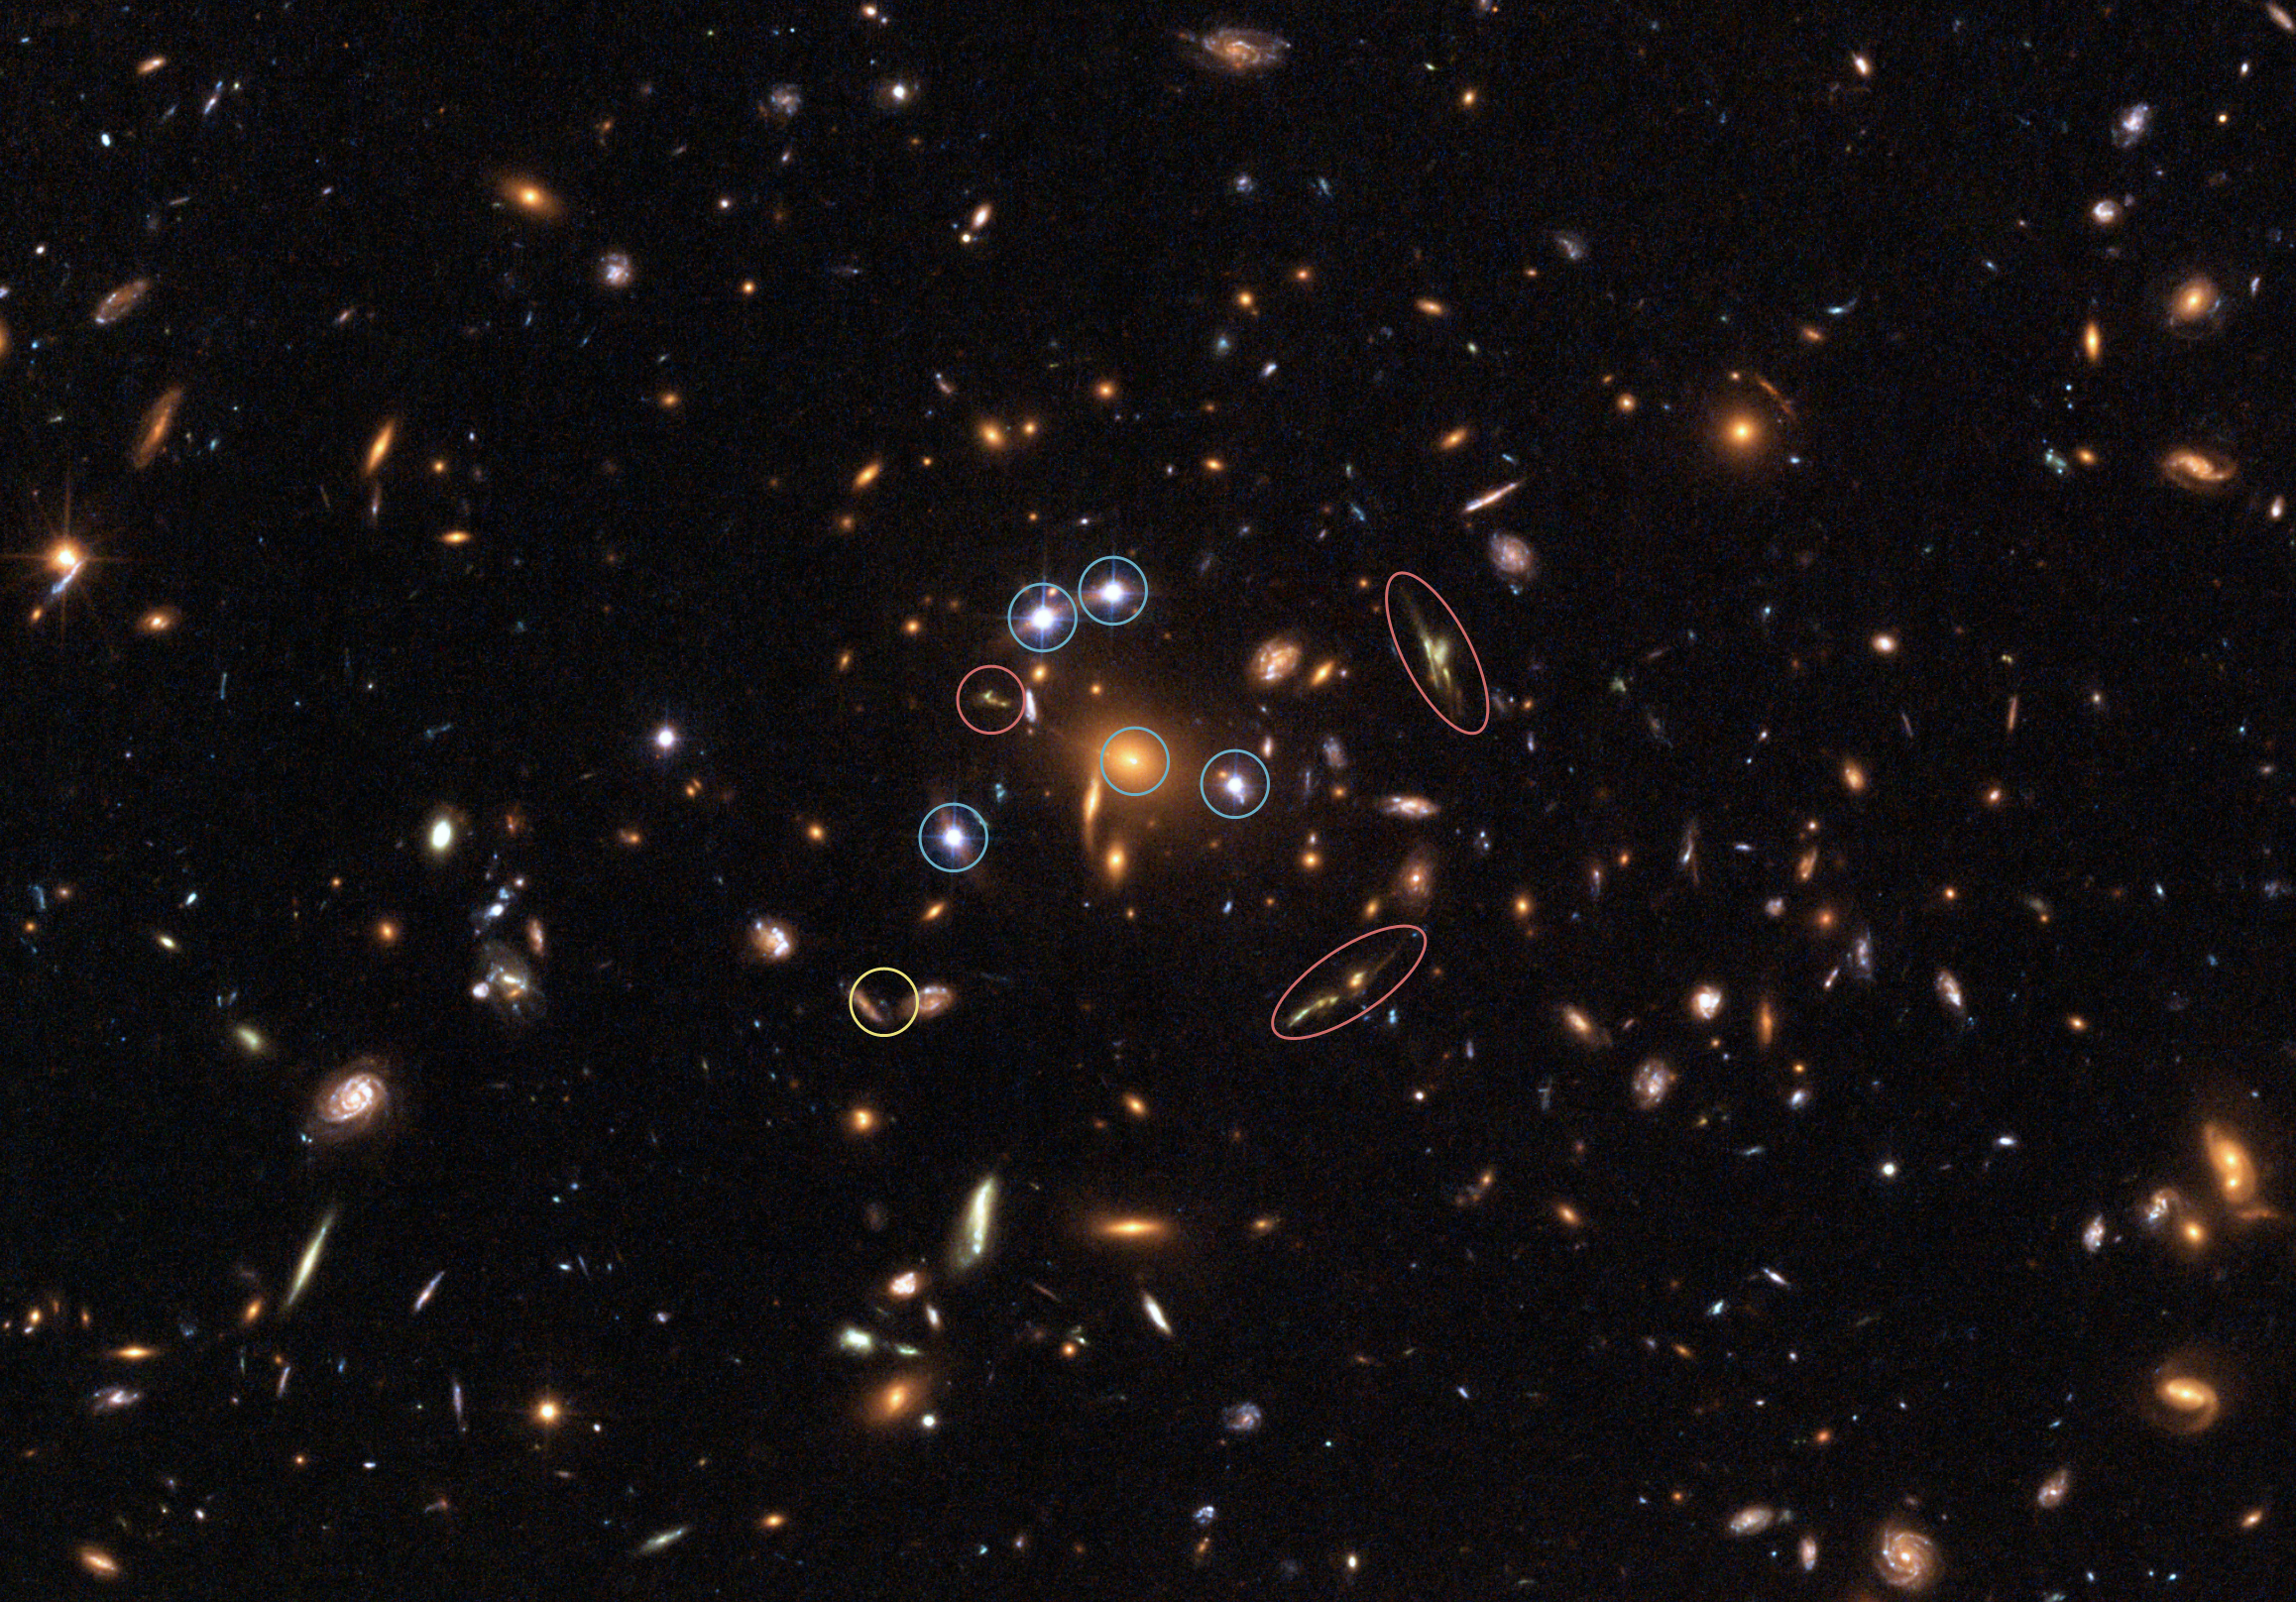

Hubble captures a "five-star" rated gravitational lens

This full-size Hubble image shows galaxy cluster SDSS J1004+4112 with three rare phenomena marked. The blue circles show a unique five time gravitationally lensed quasar. This image is the first-ever picture of such an object. A gravitational lens will always produce an odd number of lensed images, but one image is usually very weak and embedded deep within the light of the lensing object itself. Hubble's sharp vision and the high magnification of this gravitational lens combine to place the fifth image far enough from the core of the central imaging galaxy to make it visible.

The red circles mark three remarkably different images of the same background galaxy. The galaxy is 12 billion light years away (a redshift of 3.33, corresponding to only 1.8 billion years after the Big Bang).

The yellow circle marks a supernova that was found by comparing this image to a picture of the cluster obtained with Hubble a year earlier. This supernova exploded seven billion years ago in one of the cluster galaxies. This image, together with other supernova observations, is being used to try to reconstruct how the Universe was enriched by heavy elements through these explosions.

Credit: European Space Agency, NASA, Keren Sharon (Tel-Aviv University) and Eran Ofek (CalTech)